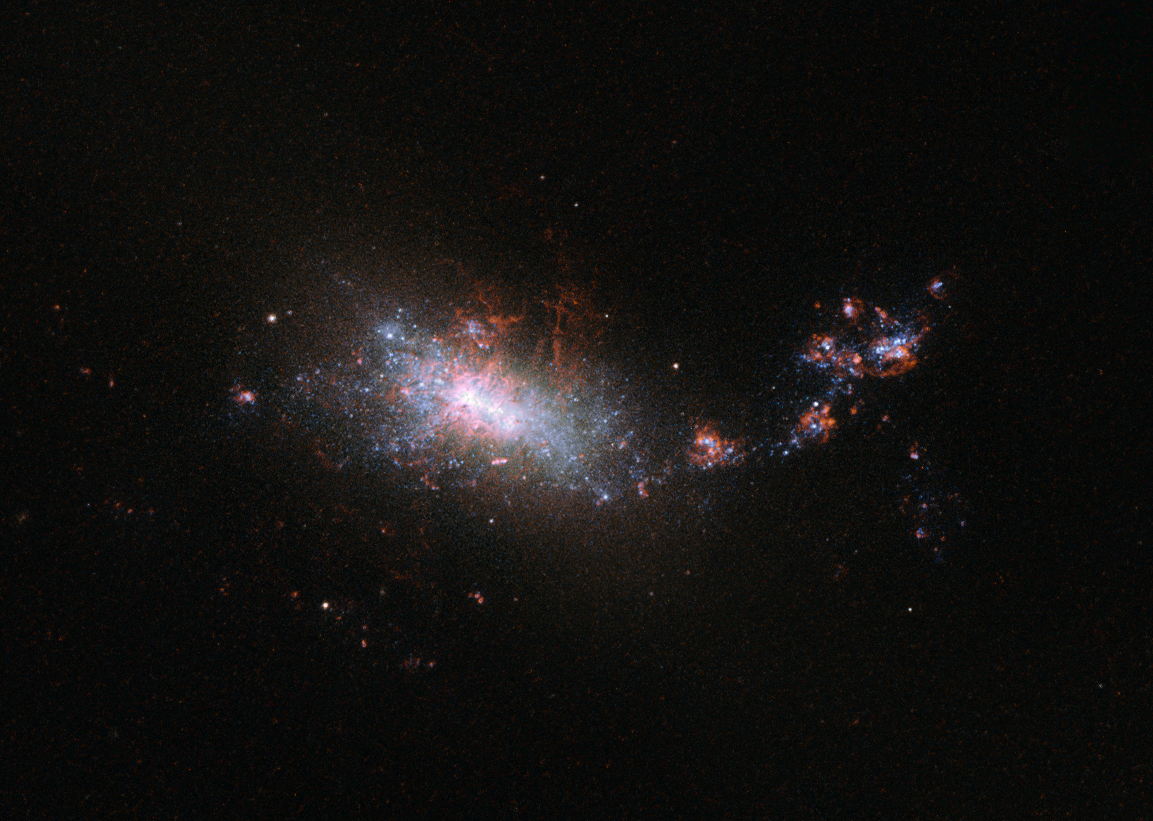

A galactic nursery

This dramatic image shows the NASA/ESA Hubble Space Telescope’s view of dwarf galaxy known as NGC 1140, which lies 60 million light-years away in the constellation of Eridanus. As can be seen in this image NGC 1140 has an irregular form, much like the Large Magellanic Cloud — a small galaxy that orbits the Milky Way.

This small galaxy is undergoing what is known as a starburst. Despite being almost ten times smaller than the Milky Way it is creating stars at about the same rate, with the equivalent of one star the size of the Sun being created per year. This is clearly visible in the image, which shows the galaxy illuminated by bright, blue-white, young stars.

Galaxies like NGC 1140 — small, starbursting and containing large amounts of primordial gas with way fewer elements heavier than hydrogen and helium than present in our Sun — are of particular interest to astronomers. Their composition makes them similar to the intensely star-forming galaxies in the early Universe. And these early Universe galaxies were the building blocks of present-day large galaxies like our galaxy, the Milky Way. But, as they are so far away these early Universe galaxies are harder to study so these closer starbursting galaxies are a good substitute for learning more about galaxy evolution .

The vigorous star formation will have a very destructive effect on this small dwarf galaxy in its future. When the larger stars in the galaxy die, and explode as supernovae, gas is blown into space and may easily escape the gravitational pull of the galaxy. The ejection of gas from the galaxy means it is throwing out its potential for future stars as this gas is one of the building blocks of star formation. NGC 1140’s starburst cannot last for long.

Credit: ESA/Hubble & NASA